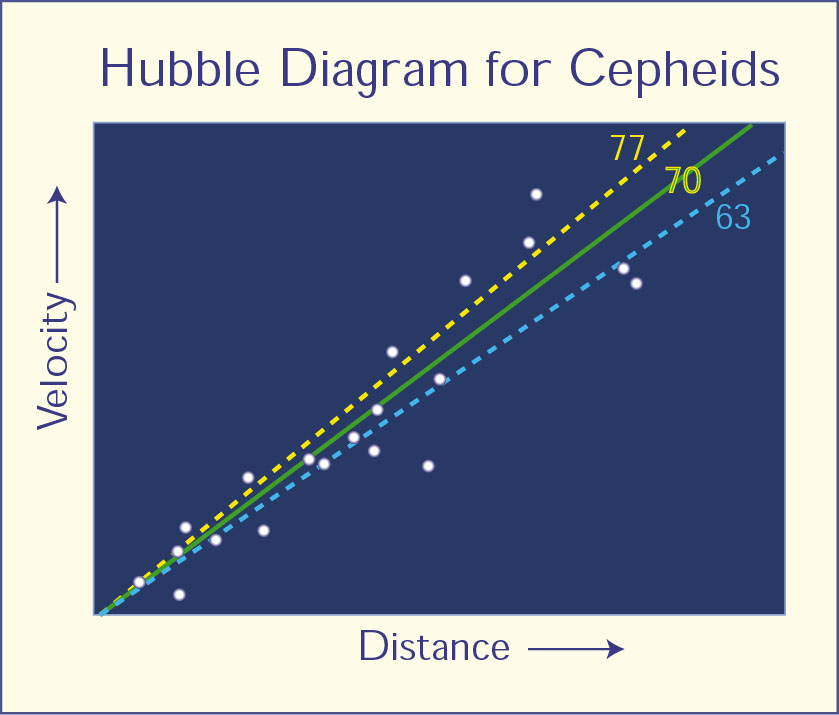

Hubble diagram for Cepheids

Hubble Diagram for Cepheids This is a plot of galaxy distance versus the velocity that the galaxy appears to be receding from Earth. It is based on data collected by the Hubble Space Telescope Key Project team. The distances have been measured using Cepheid variables. The slope in the plot measures the expansion rate of the universe, a quantity called the Hubble constant. The best fit to the data yields a Hubble constant of 70 kilometers/second/megaparsec. The dashed lines indicate Hubble constant values of 77 and 63 and do not fit the data as well. This plot is analogous to that obtained by Carnegie astronomer Edwin Hubble that led to his discovery of the expansion of the universe. With the Hubble Space Telescope, it is now possible to measure Cepheid distances over 30 times farther away than Hubble was able to do.

Credit: NASA & ESA